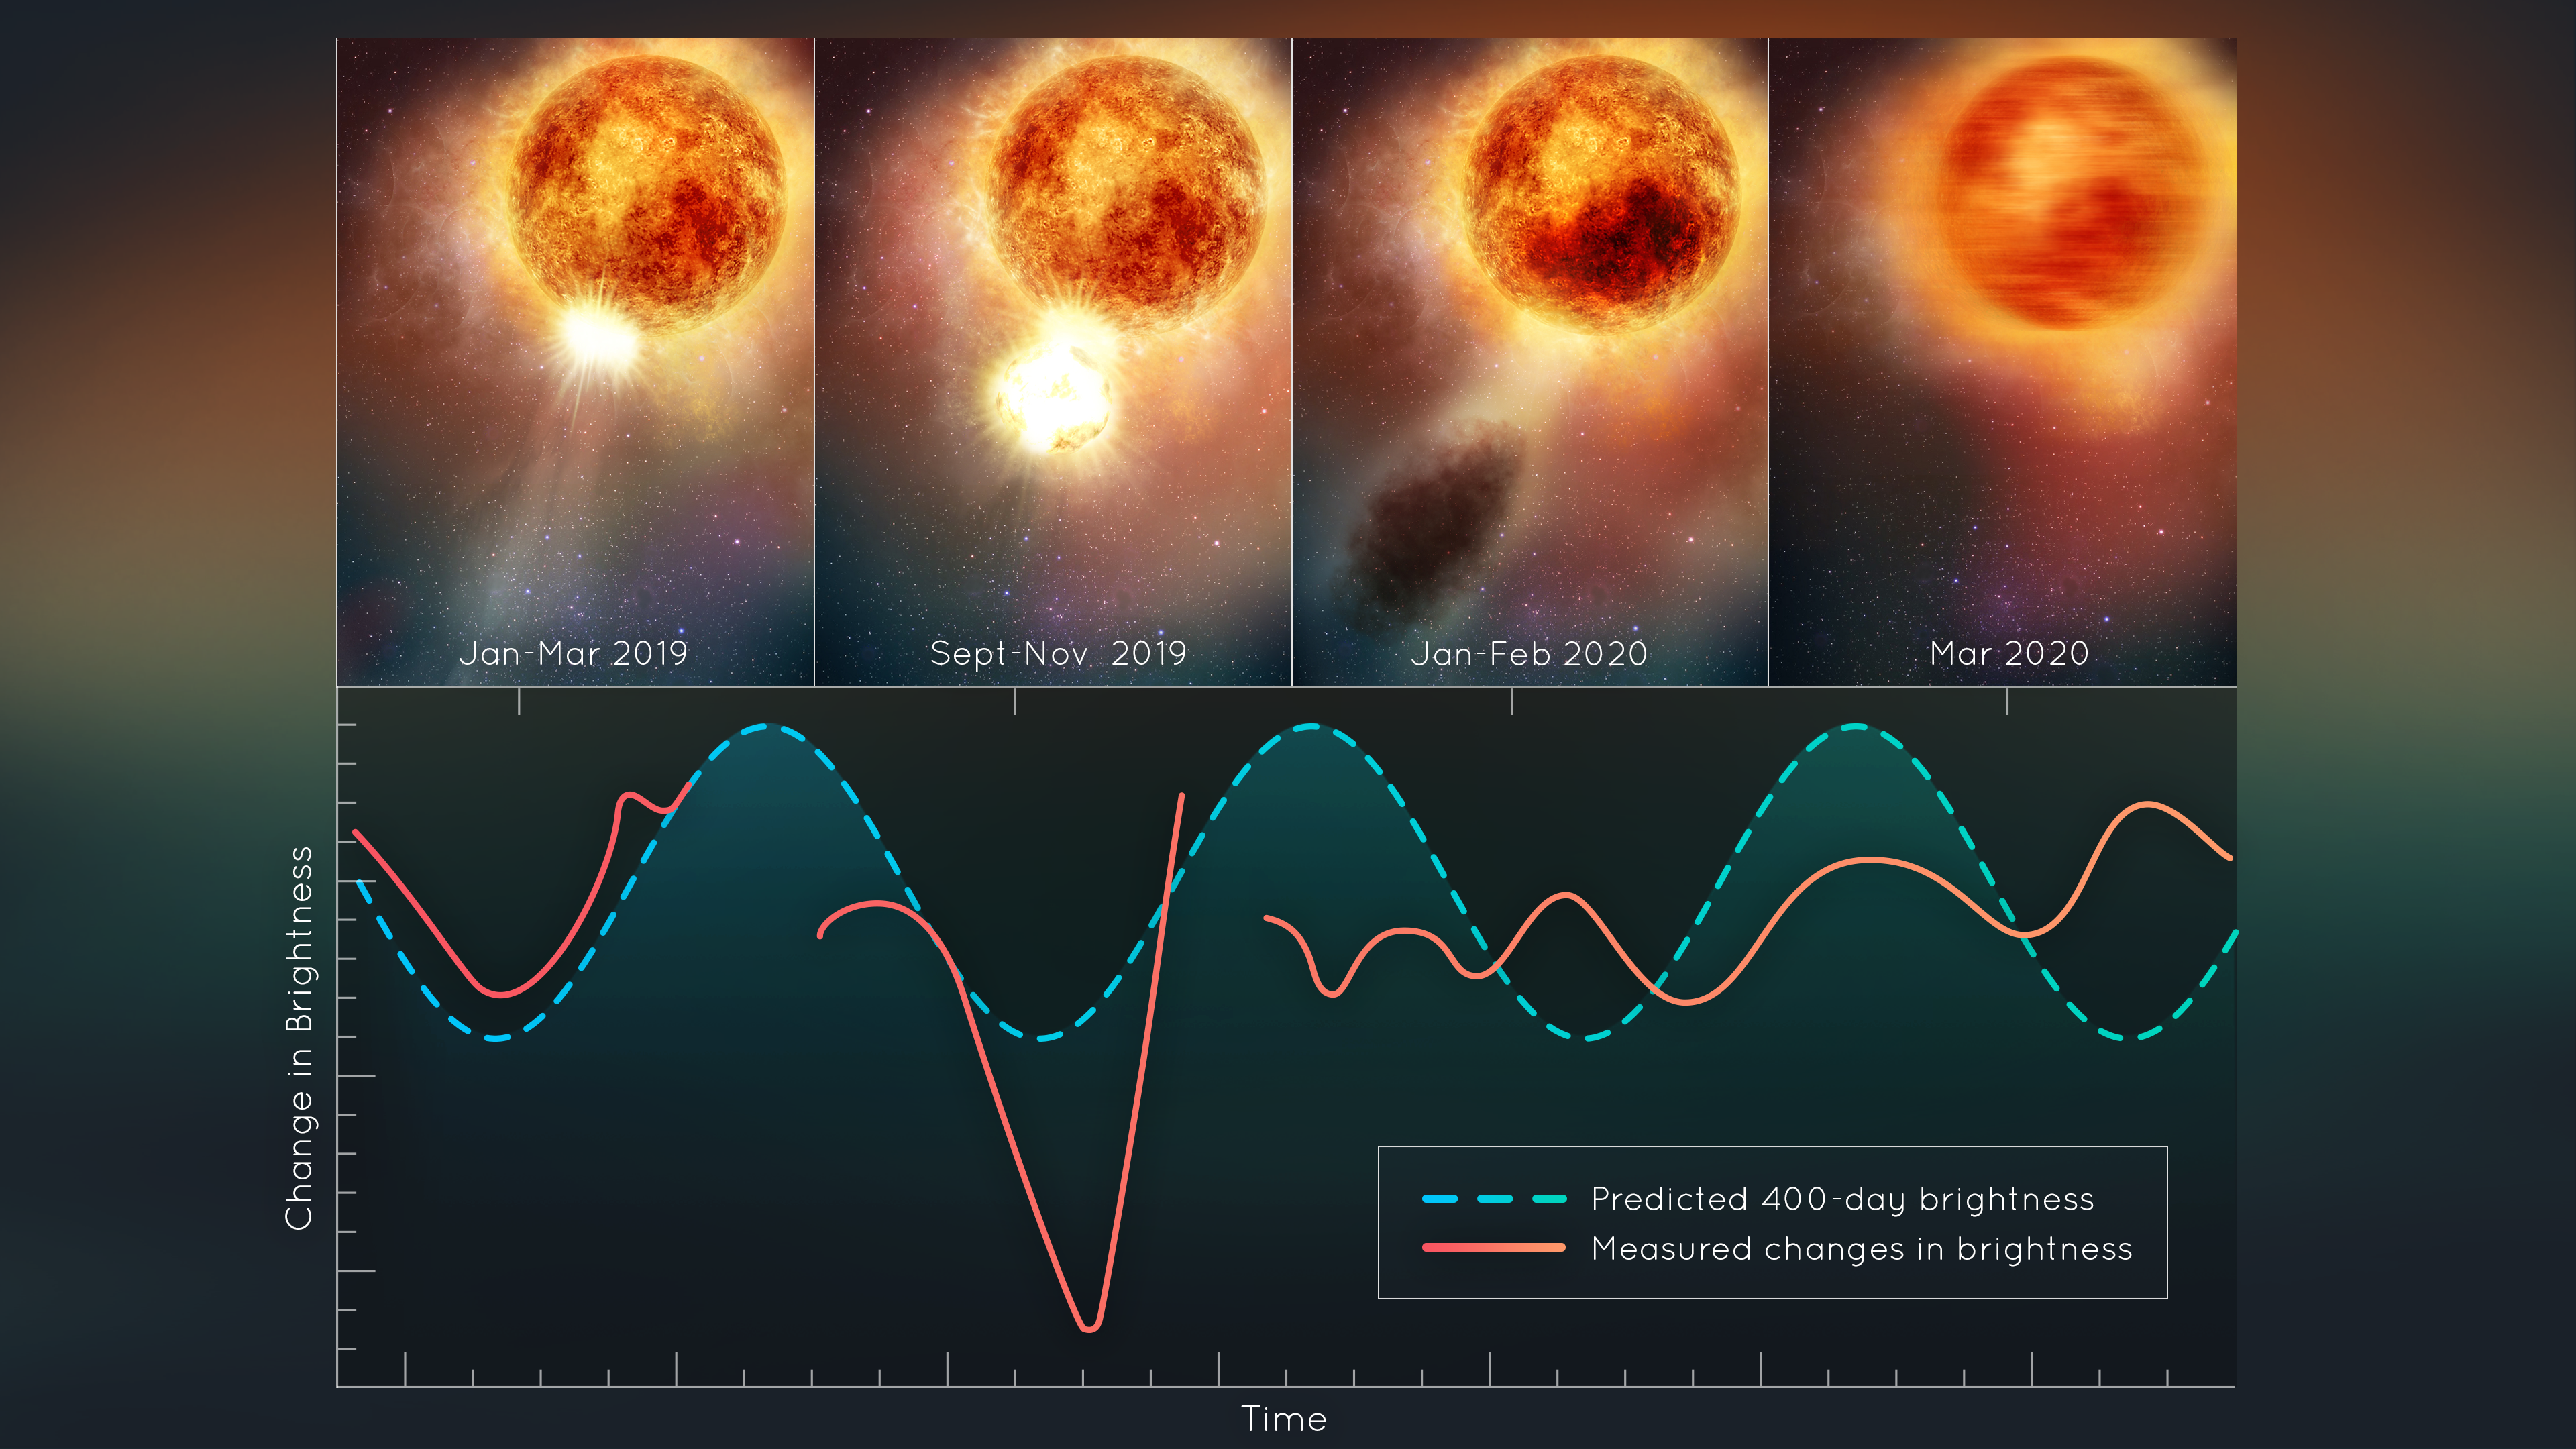

Hubble Sees Red Supergiant Star Betelgeuse Slowly Recovering After Blowing Its Top

This illustration plots changes in the brightness of the red supergiant star Betelgeuse, following the titanic mass ejection of a large piece of its visible surface. The escaping material cooled to form a cloud of dust that temporarily made the star look dimmer, as seen from Earth. This unprecedented stellar convulsion disrupted the monster star’s 400-day-long oscillation period that astronomers had measured for more than 200 years. The interior may now be jiggling like a plate of gelatin dessert.

The star Betelgeuse appears as a brilliant, ruby-red, twinkling spot of light in the upper right shoulder of the winter constellation Orion the Hunter. This ageing star is classified as a supergiant because it has swelled up to an astonishing diameter of approximately 1 billion miles. If placed at the centre of our Solar System it would reach out to the orbit of Jupiter.

The star's ultimate fate is to explode as a supernova. When that eventually happens it will be briefly visible in the daytime sky from Earth. But there are a lot of fireworks going on now before the final detonation. Astronomers using Hubble and other telescopes have deduced that the star blew off a huge piece of its visible surface in 2019. This has never before been seen on a star. Our Sun routinely goes through mass ejections of its outer atmosphere, the corona. But those events are orders of magnitude weaker than what was seen on Betelgeuse.

The first clue came when the star mysteriously darkened in late 2019. An immense cloud of obscuring dust formed from the ejected surface as it cooled. Astronomers have now pieced together a scenario for the upheaval. And the star is still slowly recovering; the photosphere is rebuilding itself. And the interior is reverberating like a bell that has been hit with a sledgehammer, disrupting the star’s normal cycle. This doesn't mean the monster star is going to explode any time soon, but the late-life convulsions may continue to amaze astronomers.

Credit: NASA, ESA, E. Wheatley (STScI)